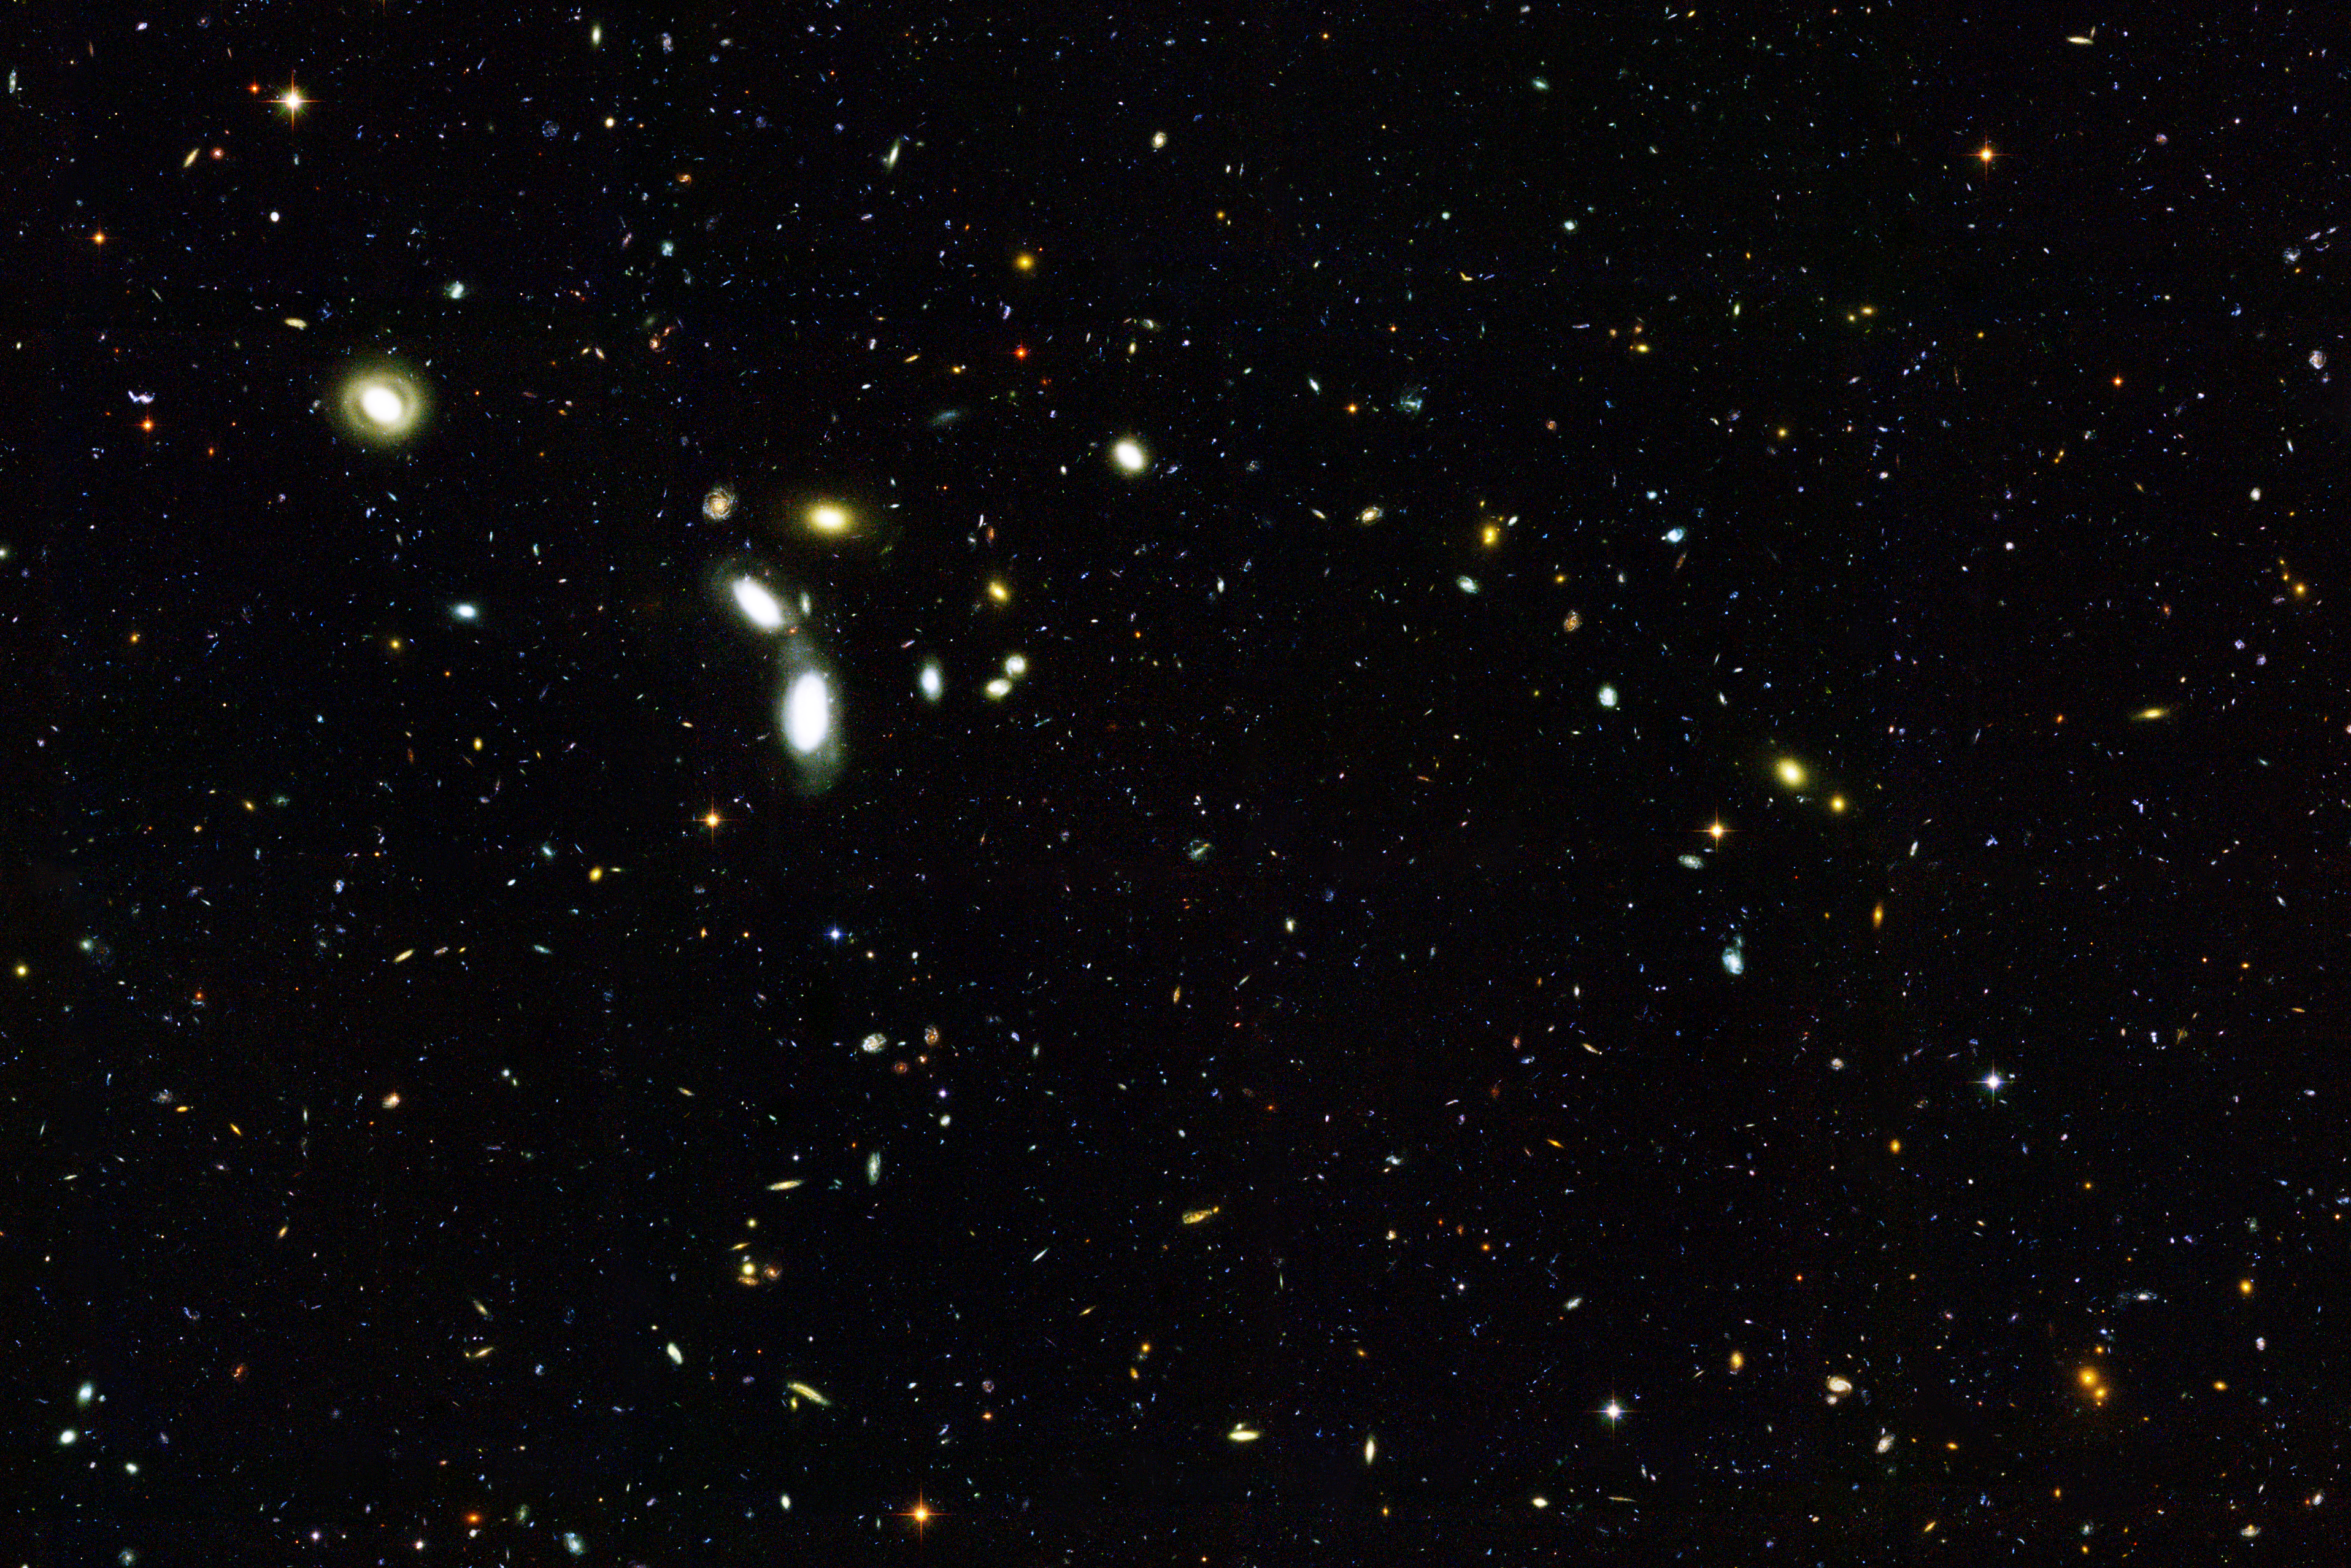

Hubble Goes 'Deep' to Sample Young Galaxies

NASA/ESA Hubble Space Telescope reached back to nearly the beginning of time to sample thousands of infant galaxies. This image, taken with Hubble's Advanced Camera for Surveys, shows several thousand galaxies, many of which appear to be interacting or in the process of forming. Some of these galaxies existed when the cosmos was less than about 2 billion years old. The foreground galaxies, however, are much closer to Earth. Two of them [the white, elongated galaxies, left of center] appear to be colliding.

This image represents less than one-tenth of the entire field surveyed by Hubble. The full field, consisting of about 25,000 galaxies, is part of a larger survey called the Great Observatories Origins Deep Survey (GOODS), the most ambitious study of the early universe yet undertaken with the Hubble telescope. This survey targeted two representative spots in the sky - one in the Northern Hemisphere and the other in the Southern Hemisphere. This image represents the southern field, located in the constellation Fornax. The entire GOODS survey reveals roughly 50,000 galaxies. Astronomers have identified more than 2,000 of them as infant galaxies, observed when the universe was less than about 2 billion years old.

Credit: NASA, ESA, the GOODS Team and M. Giavalisco (STScI)